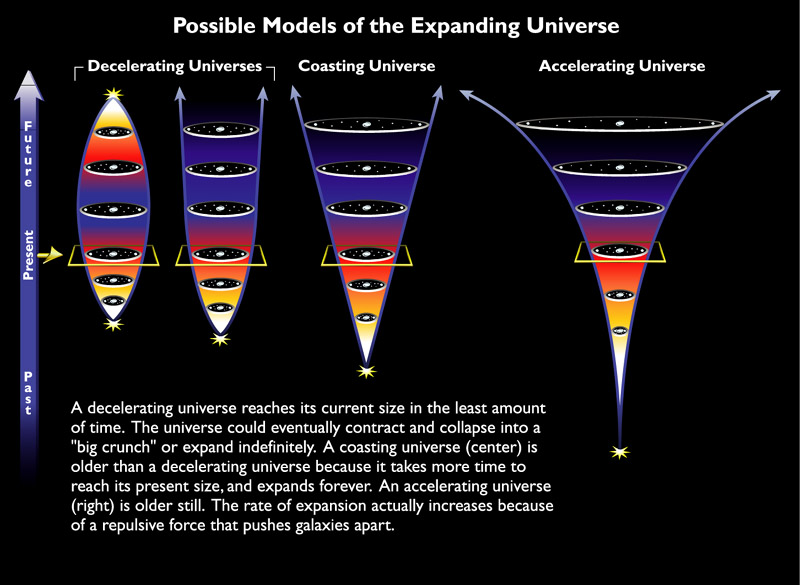

Possible models of the expanding Universe

The expansion of the Universe is a key feature of the Big Bang cosmology and is a generic property of the universe we inhabit. Since Edwin Hubble"s observation in 1929, which led to the discovery of the expansion of the Universe, astronomers try to understand the behavior of it. Several models were created up today which shall explain the past and the future expansion:

A decelerating universe reaches its current size in the least amount of time. The universe could eventually contract and collapse into a "big crunch" or expand indefinetly. A coasting universe is older than a decelerating universe because it takes more time to reach its present size and expands forever. An accelerating universe on the other hand is older still. The rate of expansion actually increases because of a repulsive force that pushes galaxies apart.

Credit: NASA & ESA